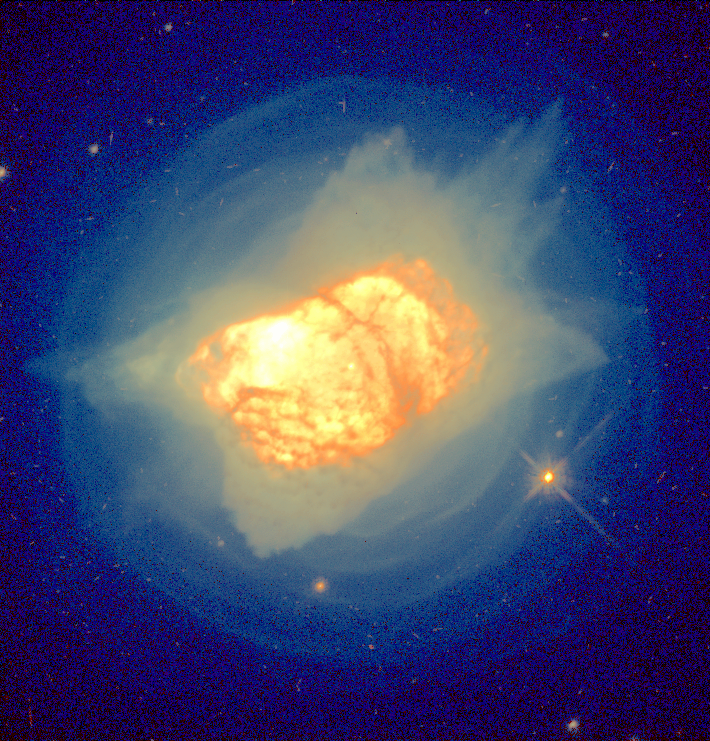

Stellar Death Process

This Hubble Space Telescope image of planetary nebula NGC 7027 shows remarkable new details of the process by which a star like the Sun dies.

New features include: faint, blue, concentric shells surrounding the nebula; an extensive network of red dust clouds throughout the bright inner region; and the hot central white dwarf, visible as a white dot at the center.

Credit: H. Bond (STScI) and NASA/ESA